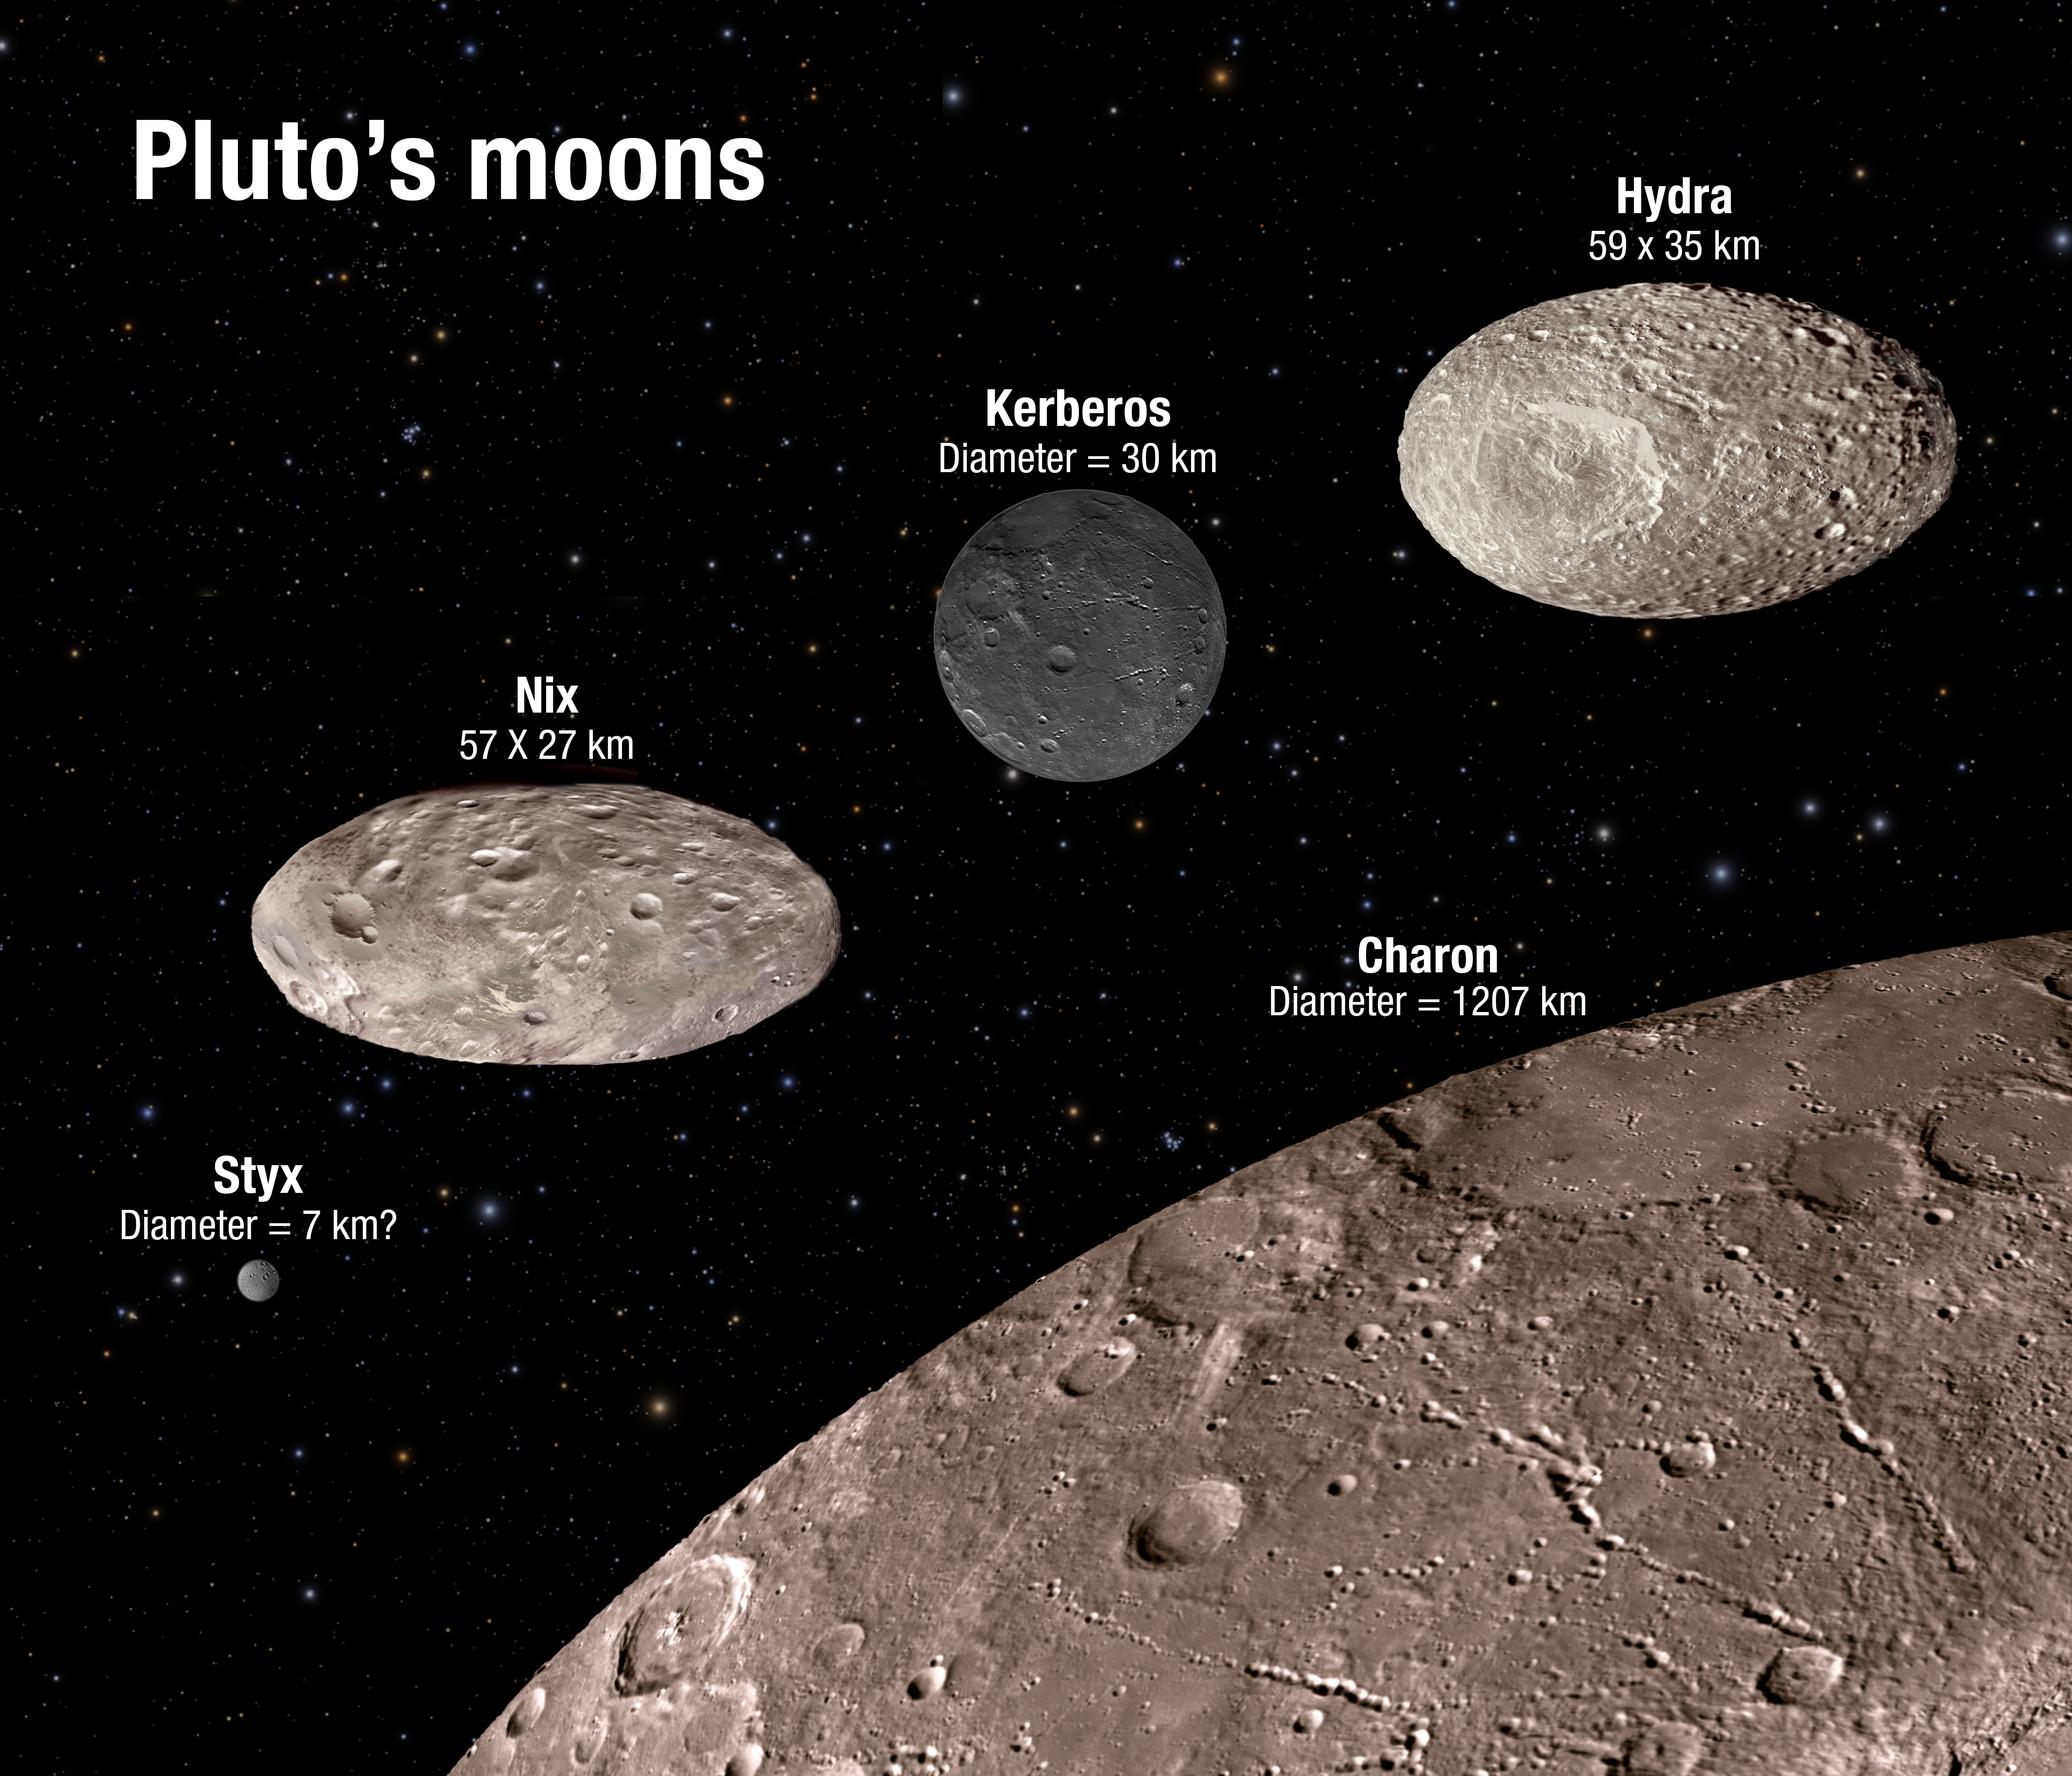

Pluto’s moons

This illustration shows the scale and comparative brightness of Pluto’s small satellites, as discovered by Hubble over the past years. Pluto’s binary companion, Charon — discovered in 1978 — is placed at the bottom for scale. The image illustrates that two of the moons are highly oblate and that the reflectivity among the moons varies from dark charcoal to the brightness of sand. As Hubble cannot resolve surface features on the moons the textures seen here are purely for illustration purposes.

Credit: NASA, ESA, A. Field (STScI)